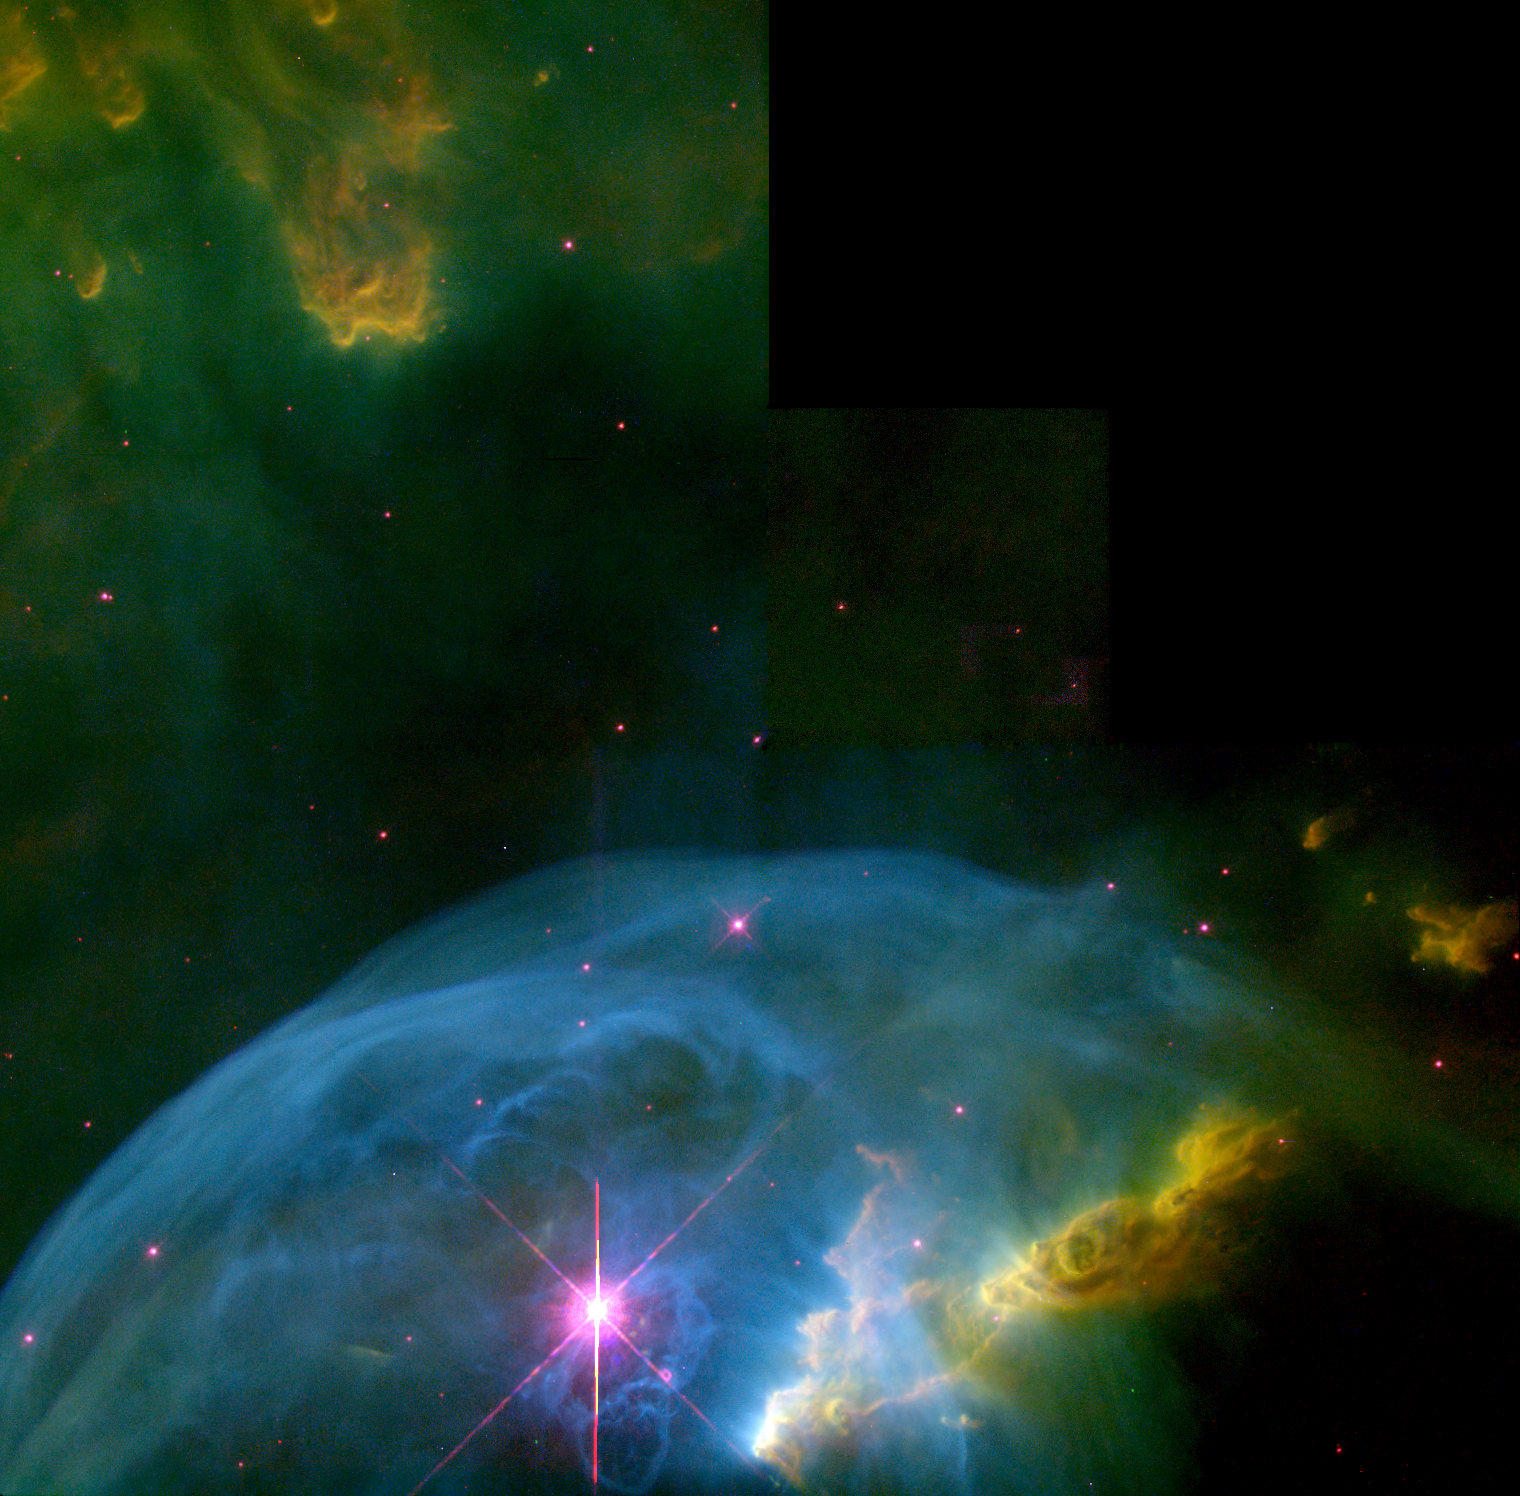

An expanding bubble in space

Astronomers, using the Wide Field Planetary Camera 2 on board the Hubble Space Telescope in October and November 1997 and April 1999, imaged the Bubble Nebula (NGC 7635) with unprecedented clarity. For the first time, they are able to understand the geometry and dynamics of this very complicated system. Earlier pictures taken of the nebula with the Wide Field Planetary Camera 1 left many issues unanswered, as the data could not be fully calibrated for scientific use. In addition, those data never imaged the enigmatic inner structure presented here.

Credit: NASA/ESA, Donald Walter (South Carolina State University), Paul Scowen and Brian Moore (Arizona State University)